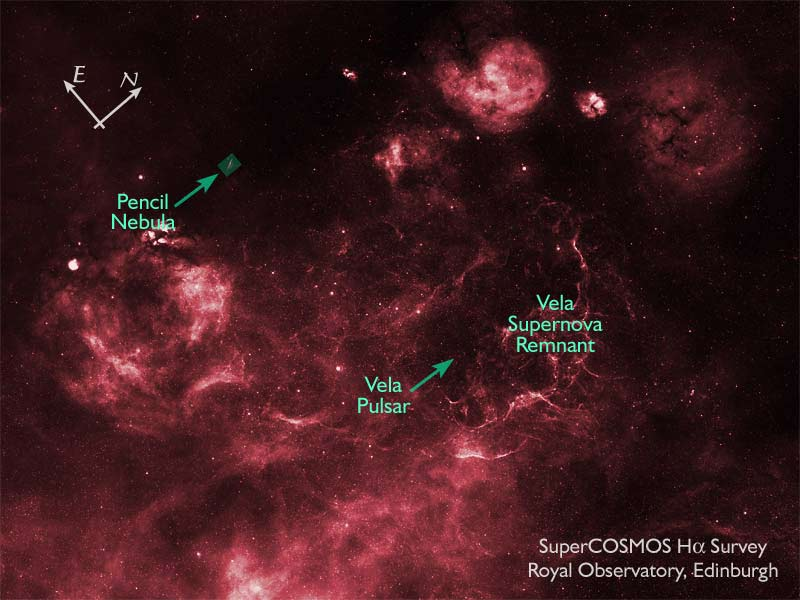

SuperCOSMOS H-alpha Survey (SHS) Image of Vela Supernova Remnant

The H-alpha survey was undertaken by the Anglo-Australian Observatory on behalf of the UK and Australian communities and had been scanned and put on line under the auspices of the Wide Field Astronomy unit. The Vela mosaic has been put together from this data by Mike Read and Quentin Parker. This image has been labled with several features and shows the location of Pencil Nebula image by David Malin.

Credit: Royal Observatory, Edinburgh